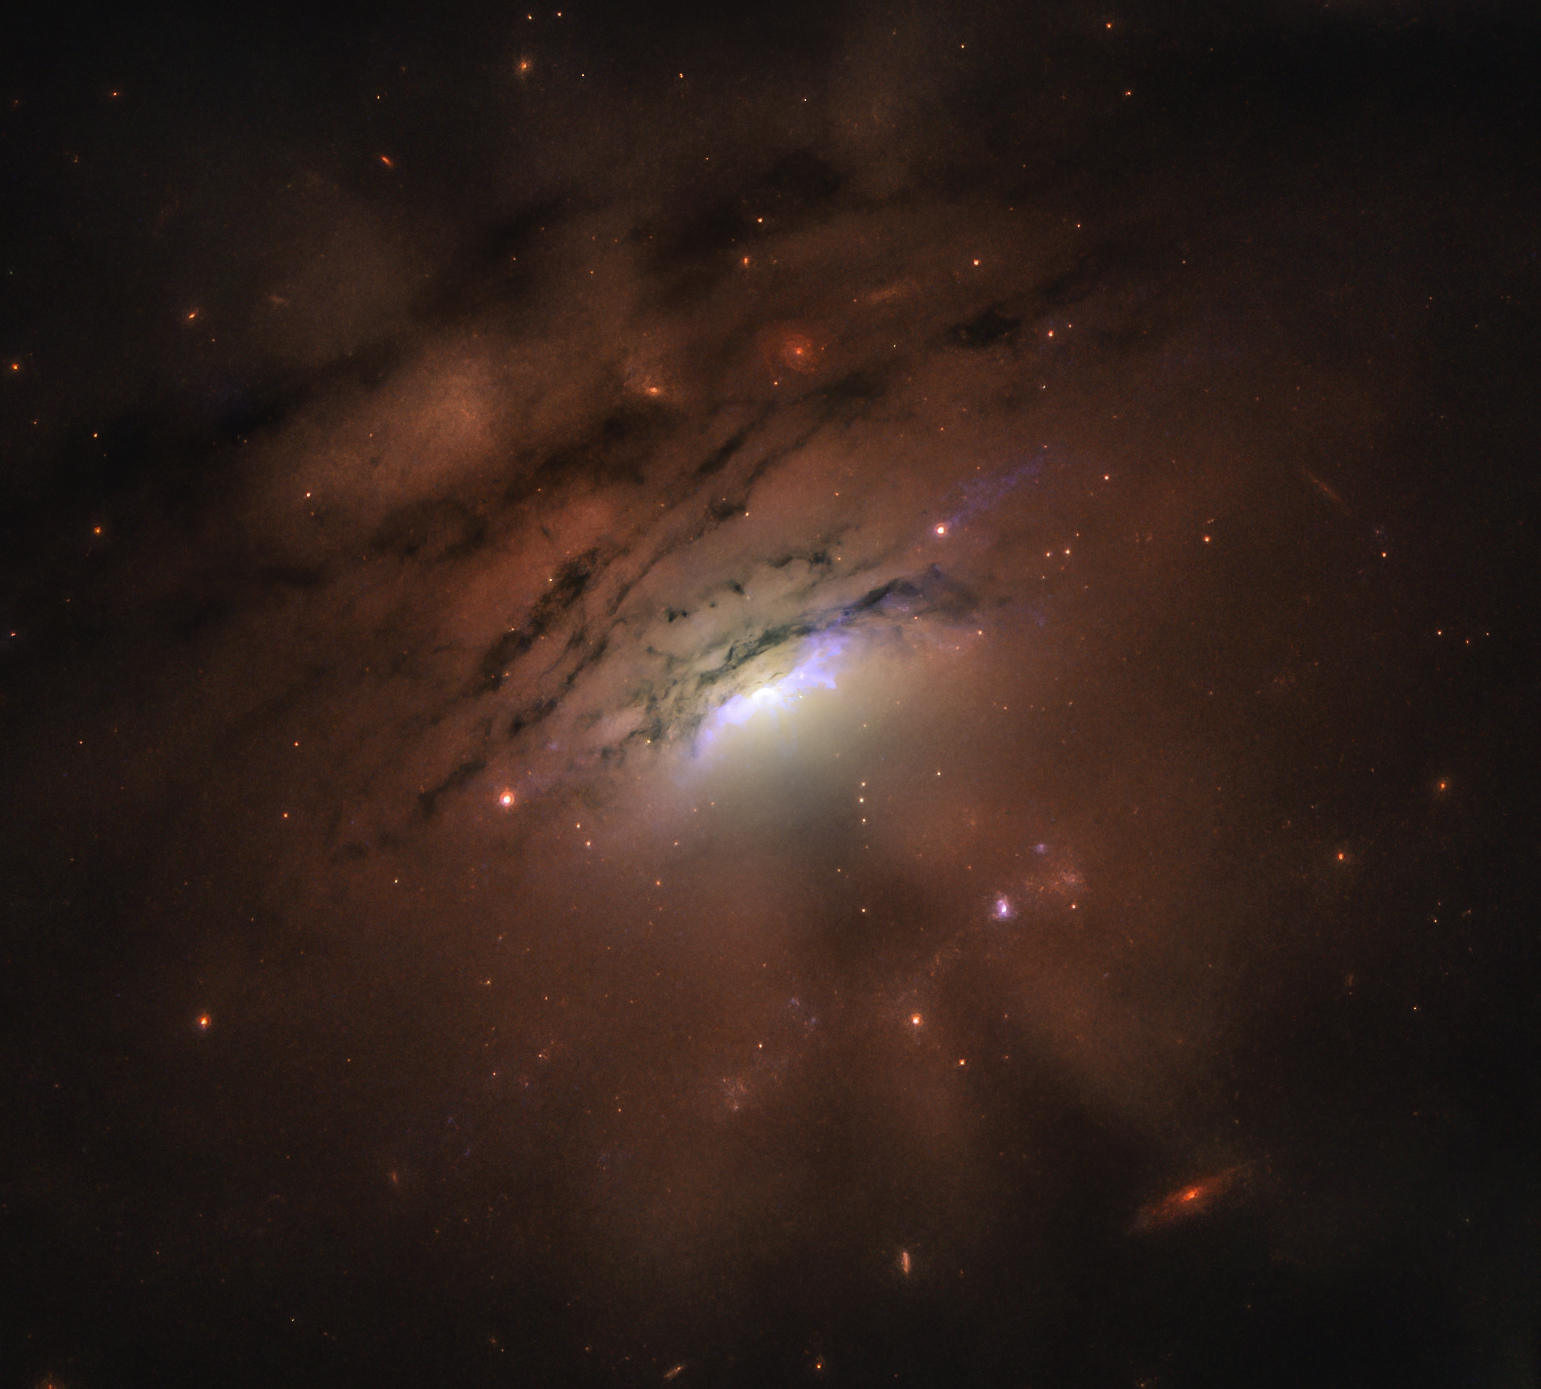

Mysterious Dark Rays

Some of the most stunning views of our sky occur at sunset, when sunlight pierces the clouds, creating a mixture of bright and dark rays formed by the clouds’ shadows and the beams of light scattered by the atmosphere. Astronomers studying the nearby galaxy IC 5063 are tantalized by a similar effect in this new image from the NASA/ESA Hubble Space Telescope. In this case, a collection of narrow bright rays and dark shadows is seen beaming out of the blazingly bright center of the active galaxy, shooting across at least 36,000 light-years.

Astronomers have traced the rays back to the galaxy’s core, the location of an active supermassive black hole. The black hole is feeding on infalling material, producing a powerful gusher of light from superheated gas near it. Although the researchers have developed several plausible theories for the lightshow, the most intriguing idea suggests that the shadows are being cast into space by an inner tube-shaped ring, or torus, of dusty material surrounding the black hole.

IC 5063 resides 156 million light-years from Earth.

Credit: NASA, ESA, and W.P. Maksym (CfA)